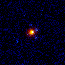

Gravitational Lenses

A gravitational lens is produced by the enormous gravitational field of a massive object which bends light to magnify, brighten and distort the image of a more distant object. Depending on the alignment between the objects and the mass distribution of the foreground lens, the more distant object can be smeared into arcs or split into pairs, triples, or even quadruple images.

Credit: Kavan Ratnatunga (Johns Hopkins University, Baltimore, MD)